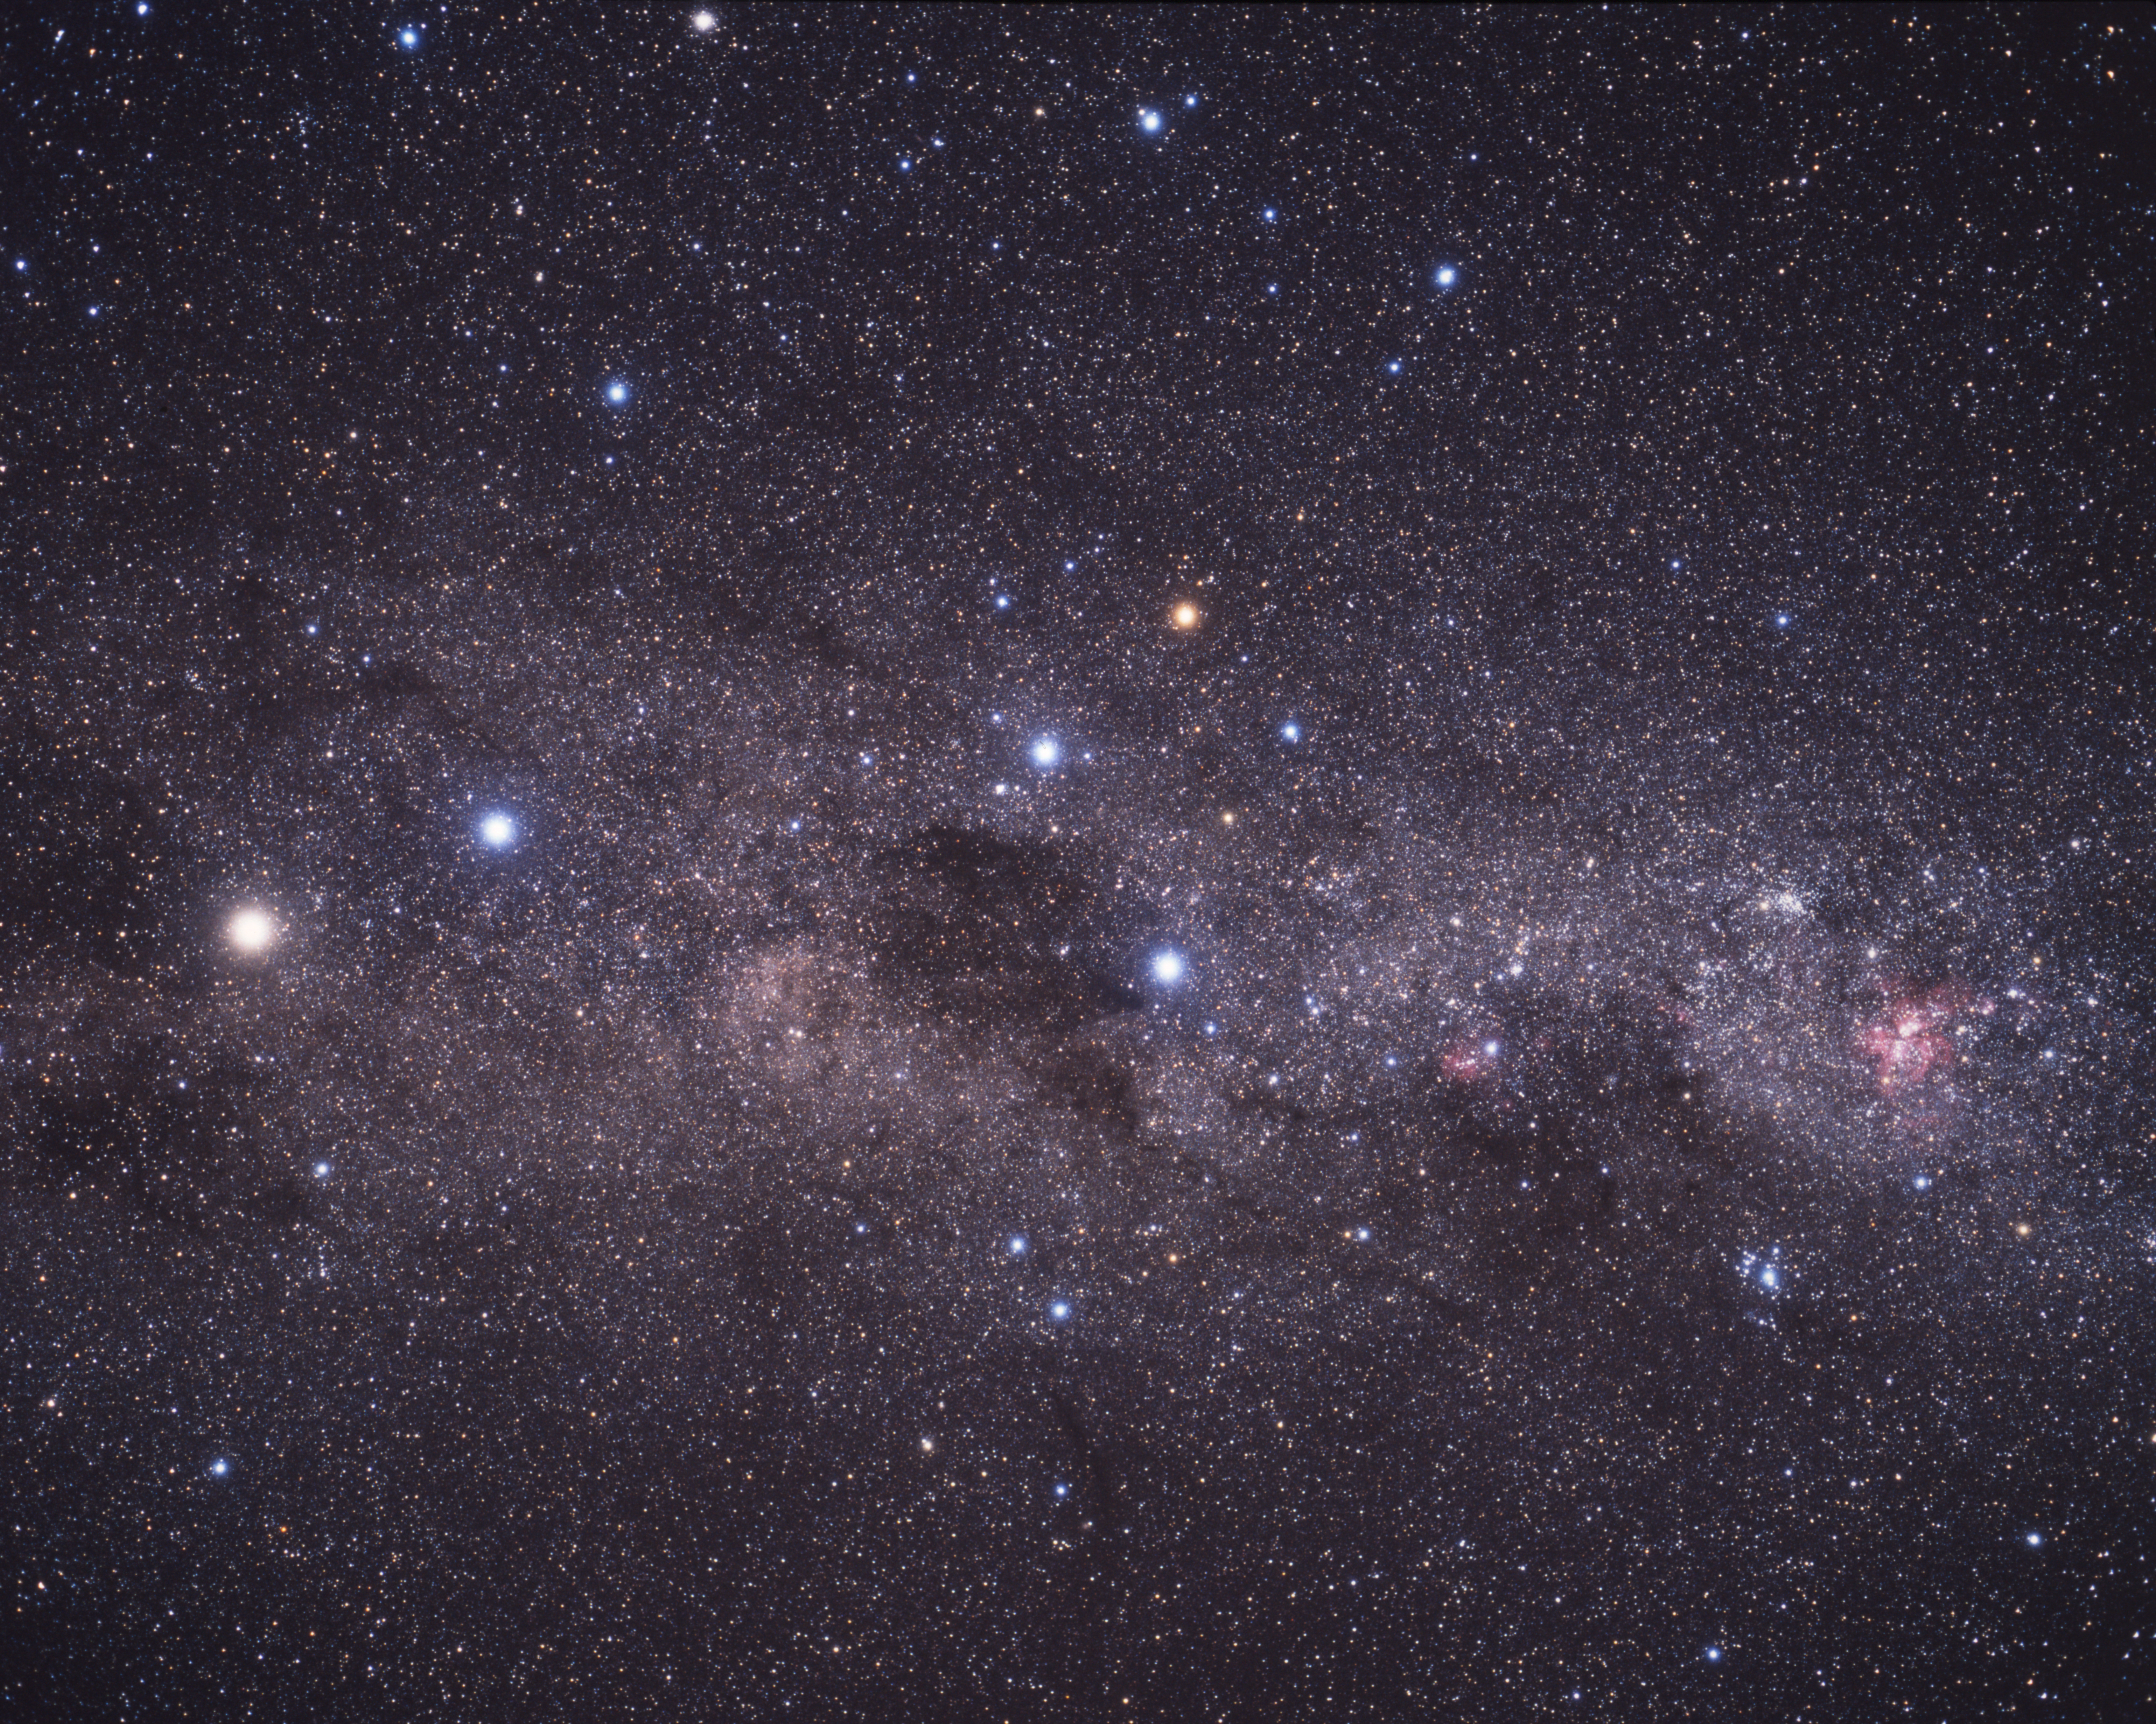

Extreme star cluster bursts into life (ground-based image)

A wide-field image of the Milky Way stretching across the southern sky. The beautiful Carina Nebula (NGC 3372) is seen at the right of the image glowing in red. It is within this spiral arm of our Milky Way that NGC 3603 resides. At the centre of the image is the constellation of the Southern Cross. The bright yellow/white star at the left of the image is alpha Centauri, in fact a system of three stars, at a distance of about 4.4 light-years from Earth.

Credit: A. Fujii